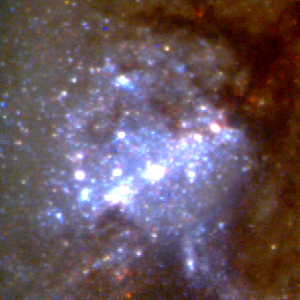

Close-Up of Star Formation in Antennae Galaxy

The collision triggers the birth of new stars in brilliant blue star clusters, the brightest of which contains roughly a million stars. The star clusters are blue because they are very young, the youngest being only a few million years old, a mere blink of the eye on the astronomical time scale.

Credit: Brad Whitmore (STScI), and NASA/ESA